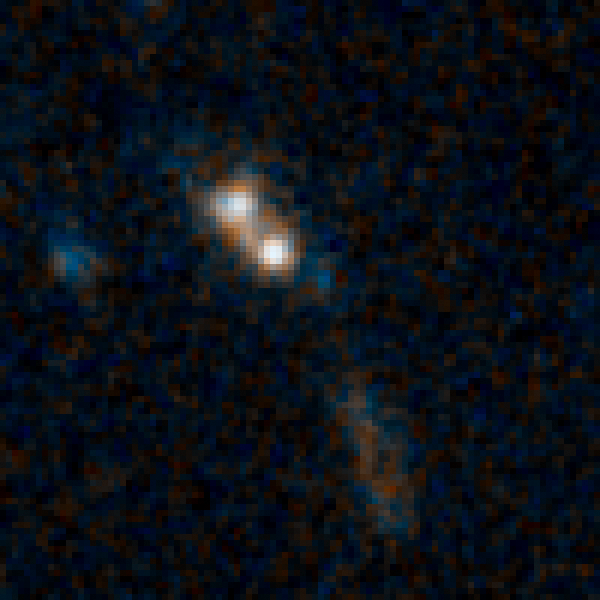

Sample galaxy 29263

A distant, obscured quasar. Quasars are the brilliant beacons of light that are powered by black holes feasting on captured material.

Credit: NASA, ESA/Hubble, and K. Schawinski (Yale University, USA)